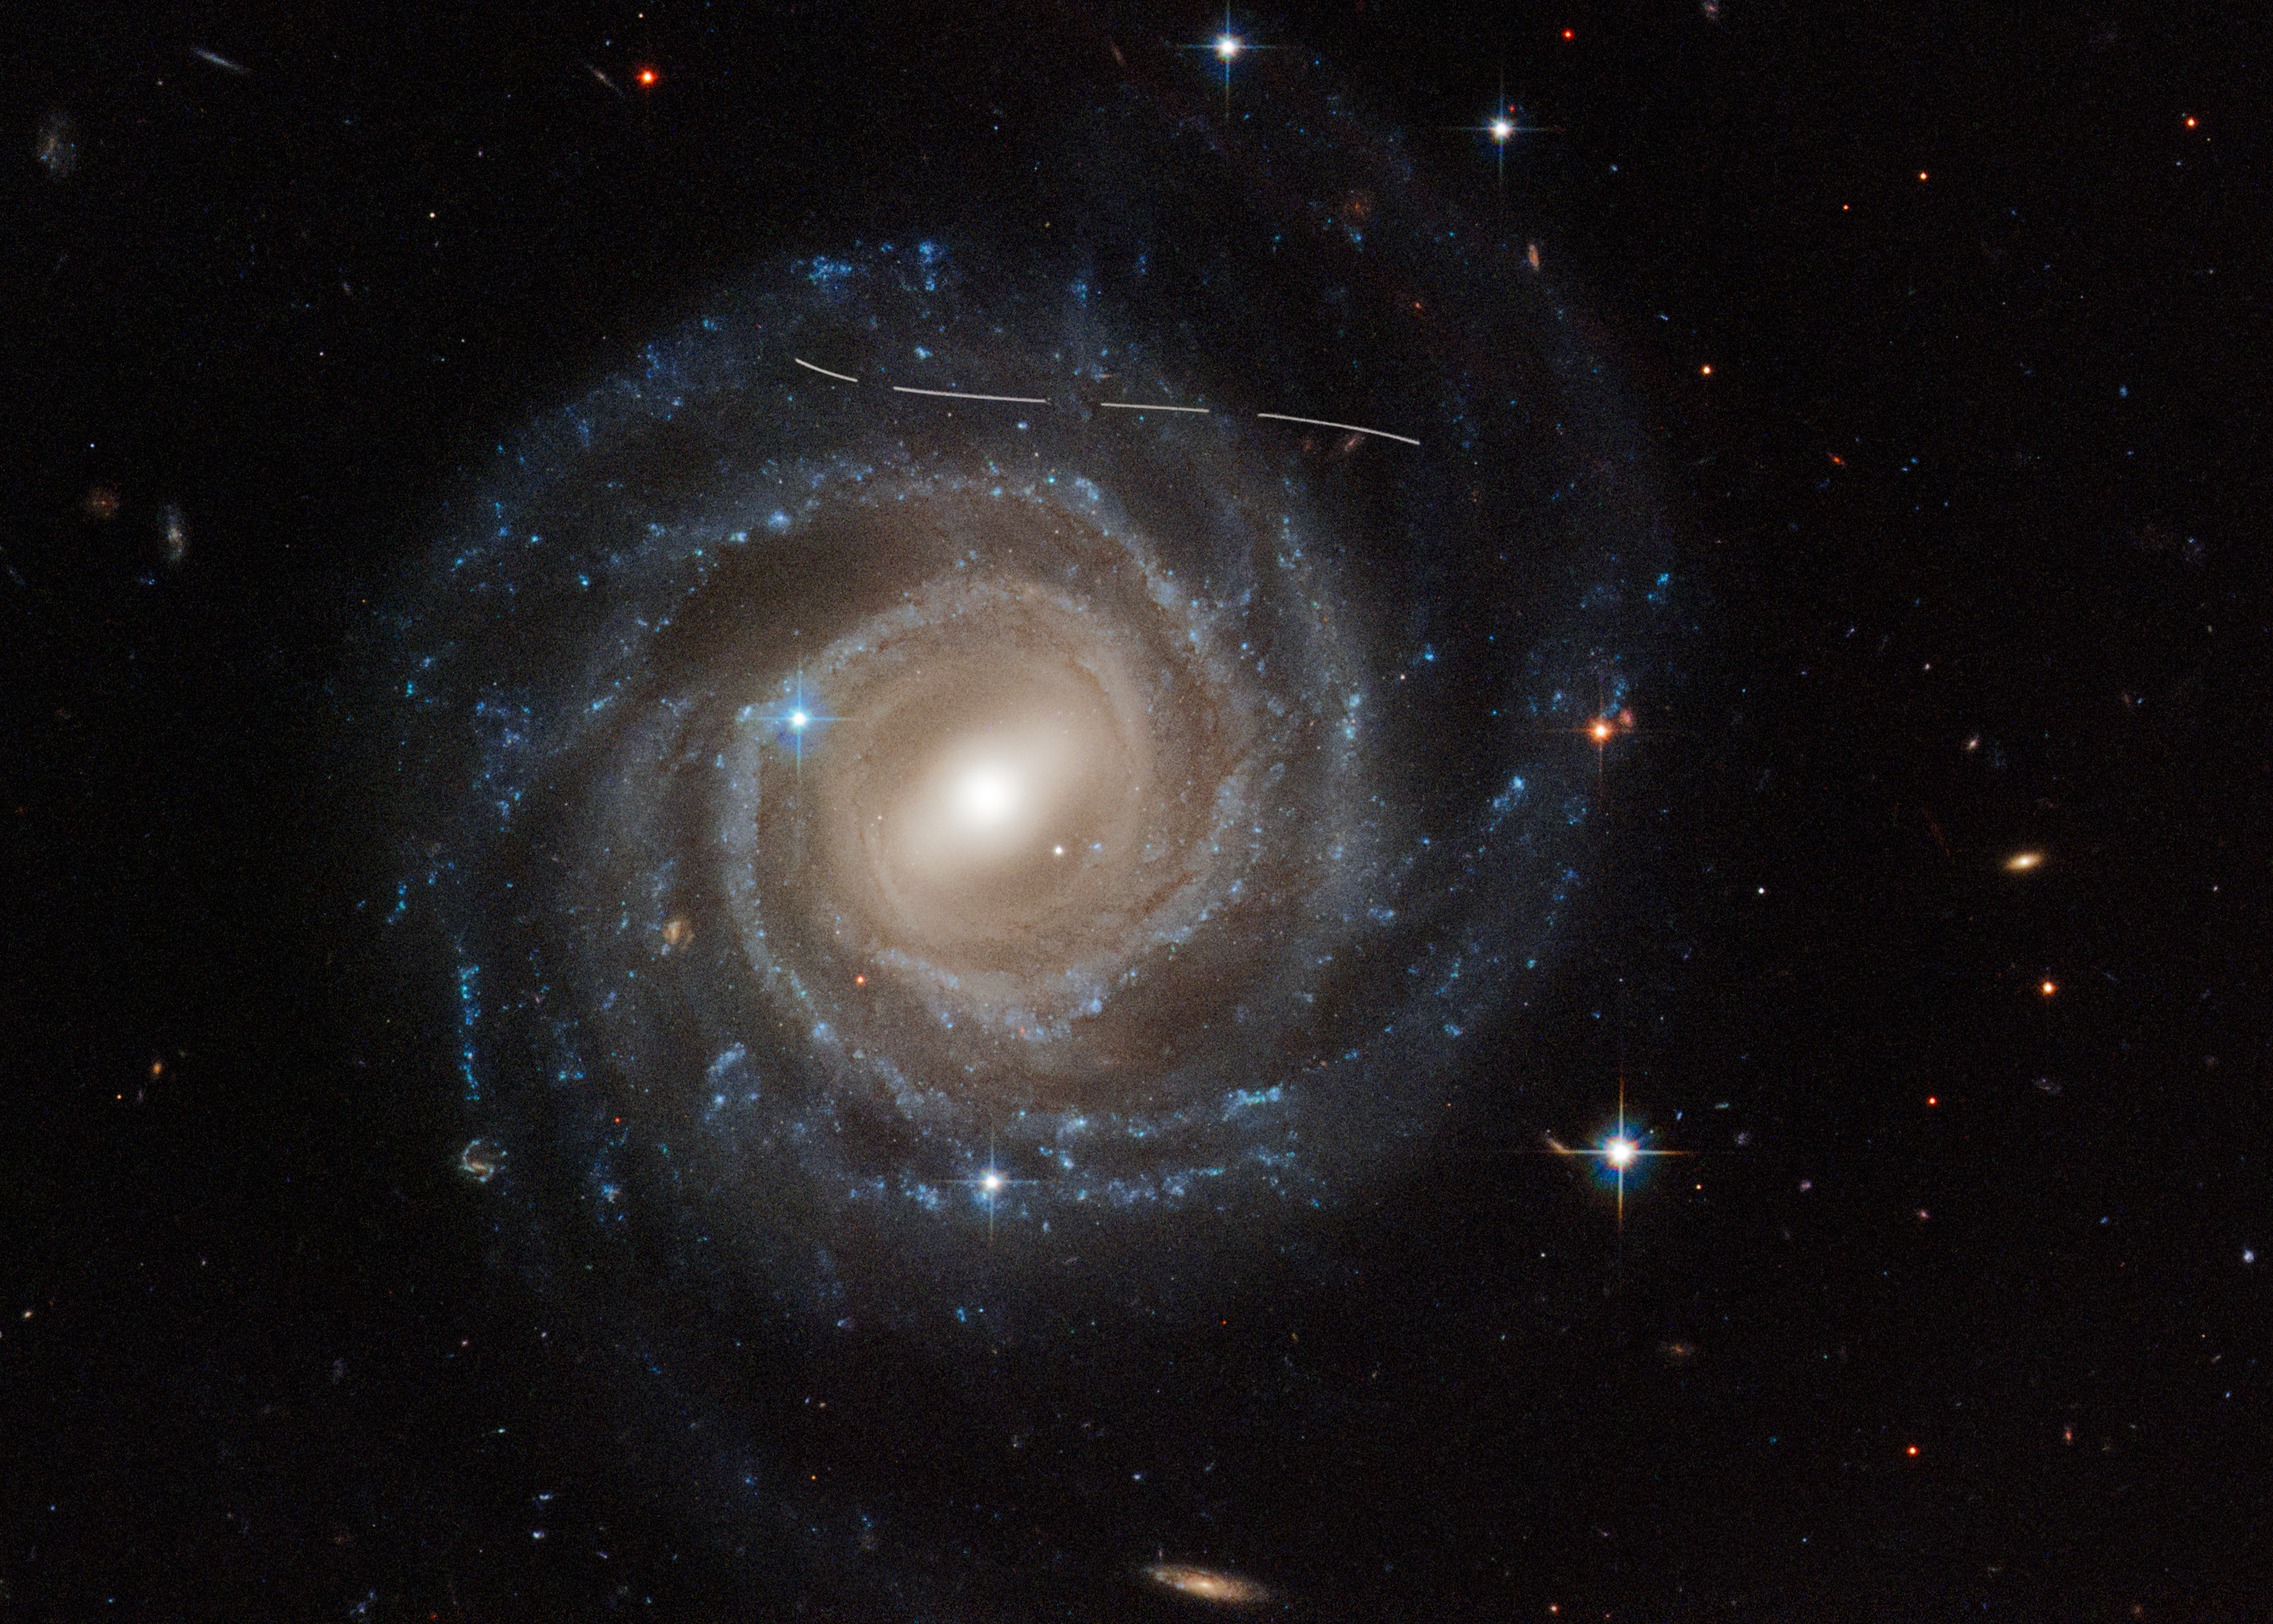

Asteroid photobombs Hubble snapshot of Galaxy UGC 12158

This NASA/ESA Hubble Space Telescope image of the barred spiral galaxy UGC 12158 looks like someone took a white marking pen to it. In reality it is a combination of time exposures of a foreground asteroid moving through Hubble’s field of view, photobombing the observation of the galaxy. Several exposures of the galaxy were taken, which is evidenced by the dashed pattern.

The asteroid appears as a curved trail as a result of parallax: Hubble is not stationary, but orbiting Earth, and this gives the illusion that the faint asteroid is swimming along a curved trajectory. The uncharted asteroid is inside the asteroid belt in our Solar System, and hence is 10 trillion times closer to Hubble than the background galaxy.

Rather than being a nuisance, this type of data is useful to astronomers for doing a census of the asteroid population in our Solar System.

Credit: NASA, ESA, P. G. Martín (Autonomous University of Madrid), J. DePasquale (STScI). Acknowledgment: A. Filippenko (University of California, Berkeley)